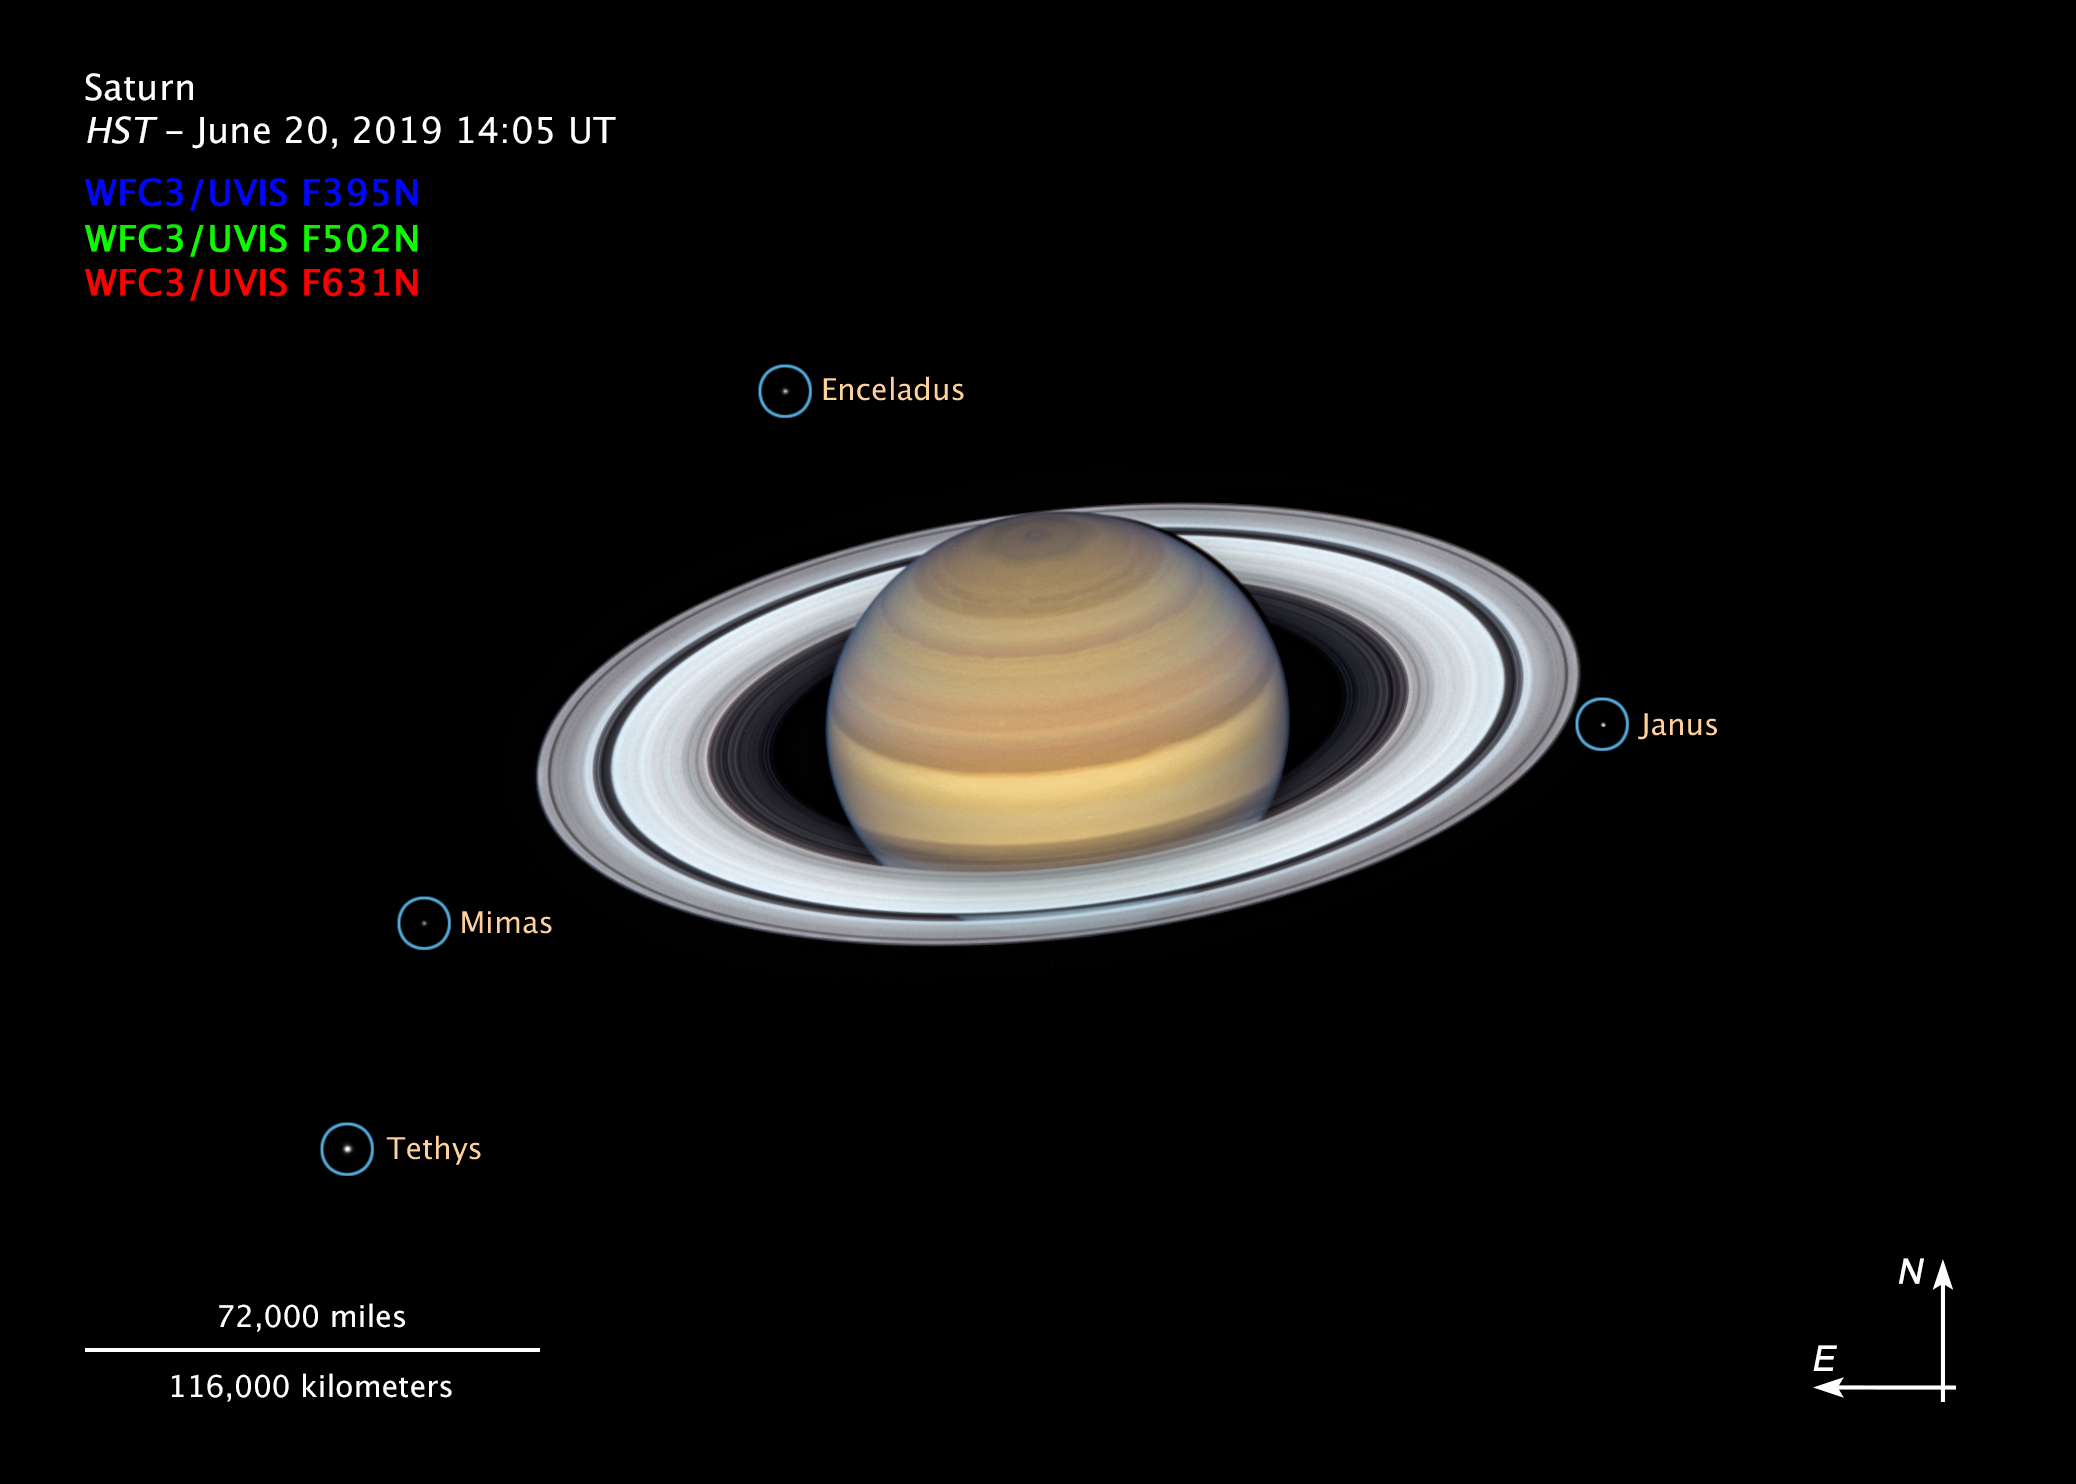

The Moons of Saturn (annotated)

This composite image, taken by the NASA/ESA Hubble Space Telescope on 20 June 2019, shows the ringed planet Saturn with four of its 62 known moons.

Credit: NASA, ESA, A. Simon (GSFC) and the OPAL Team